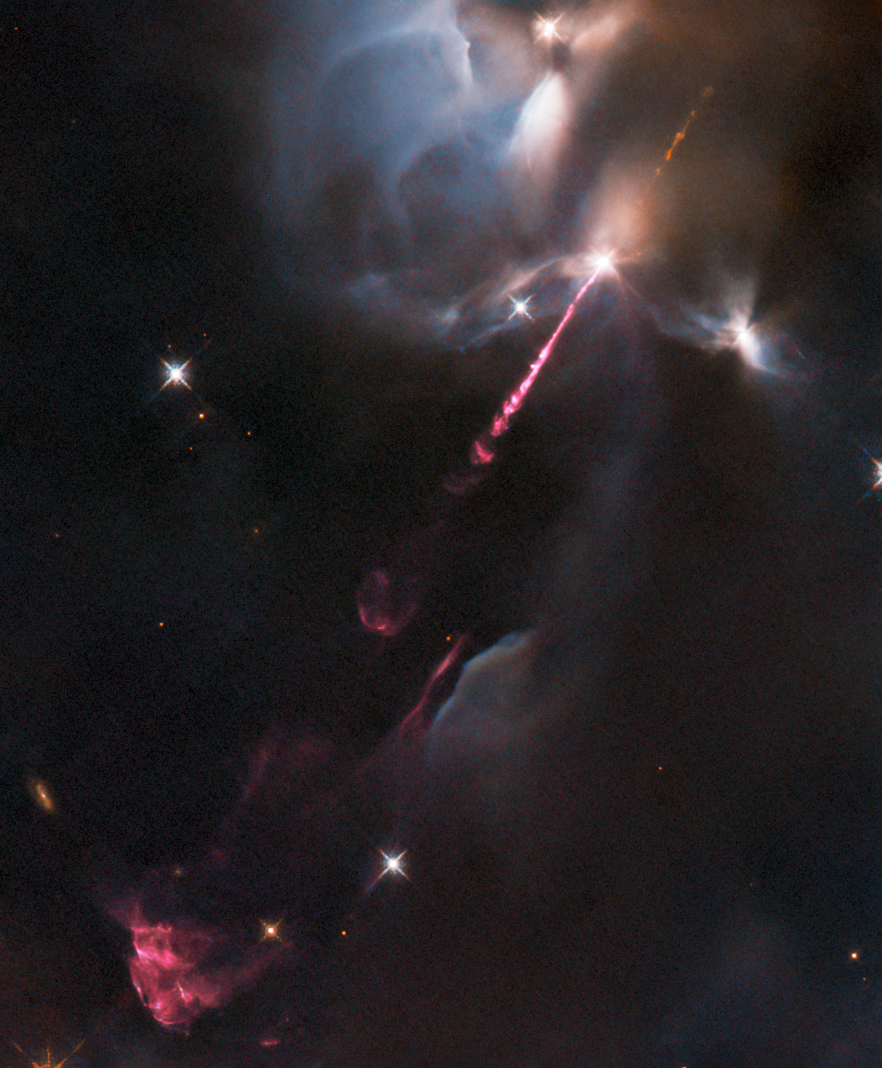

Hubble Snaps a Jet Set

An energetic outburst from an infant star streaks across this image from the NASA/ESA Hubble Space Telescope. This stellar tantrum — produced by an extremely young star in the earliest phase of formation — consists of an incandescent jet of gas travelling at supersonic speeds. As the jet collides with material surrounding the still-forming star, the shock heats this material and causes it to glow. The result is the colourfully wispy structures, which astronomers refer to as Herbig–Haro objects, billowing across the lower left of this image.

Herbig–Haro objects are seen to evolve and change significantly over just a few years. This particular object, called HH34, was previously captured by Hubble between 1994 and 2007, and again in glorious detail in 2015. HH34 resides approximately 1250 light-years from Earth in the Orion Nebula, a large region of star formation visible to the unaided eye. The Orion Nebula is one of the closest sites of widespread star formation to Earth, and as such has been pored over by astronomers in search of insights into how stars and planetary systems are born.

The data in this image are from a set of Hubble observations of four nearby bright jets with the Wide Field Camera 3 taken to help pave the way for future science with the NASA/ESA/CSA James Webb Space Telescope. Webb — which will observe at predominantly infrared wavelengths — will be able to peer into the dusty envelopes surrounding still-forming protostars, revolutionising the study of jets from these young stars. Hubble’s high-resolution images of HH34 and other jets will help astronomers interpret future observations with Webb.

Credit: ESA/Hubble & NASA, B. Nisini